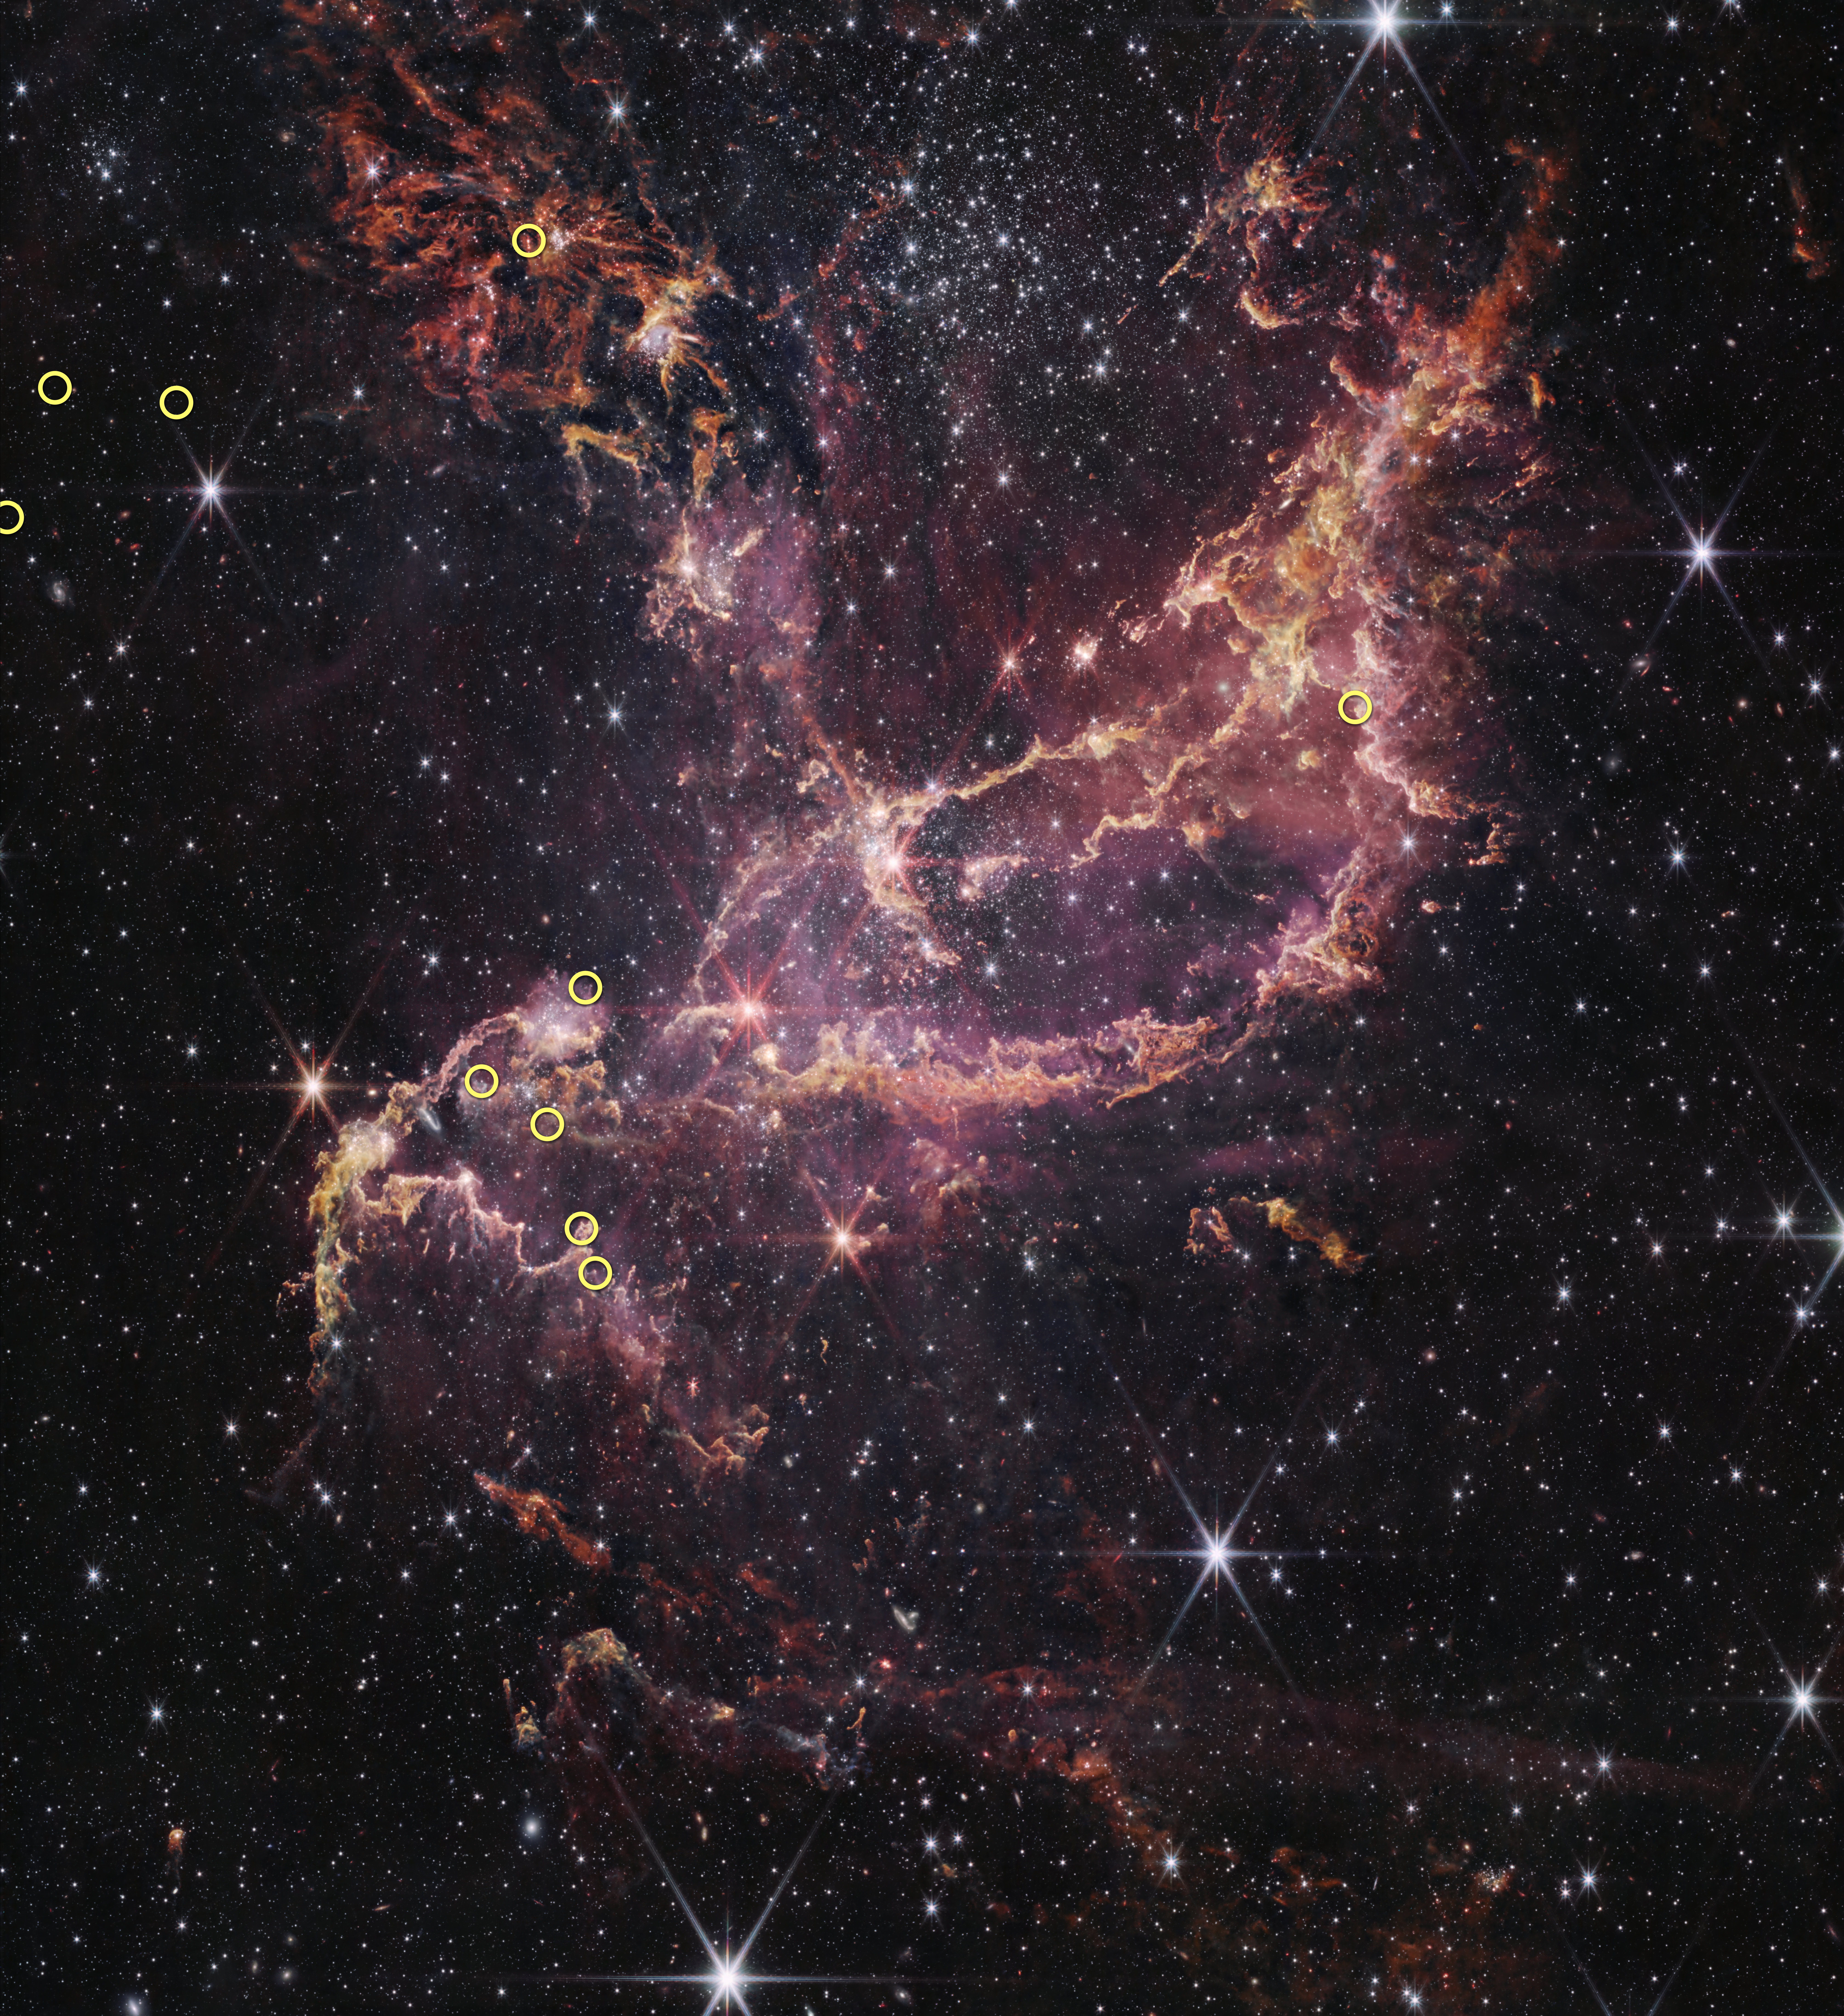

NGC 346 with 10 circled sources

This is a NASA/ESA/CSA James Webb Space Telescope image of NGC 346, a massive star cluster in the Small Magellanic Cloud, a dwarf galaxy that is one of the Milky Way’s nearest neighbors. With its relative lack of elements heavier than helium and hydrogen, the NGC 346 cluster serves as a nearby proxy for studying stellar environments with similar conditions in the early, distant Universe. Ten, small, yellow circles overlaid on the image indicate the positions of the ten stars surveyed in this study.

Credit: NASA, ESA, CSA, STScI, O. C. Jones (UK ATC), G. De Marchi (ESTEC), M. Meixner (USRA)